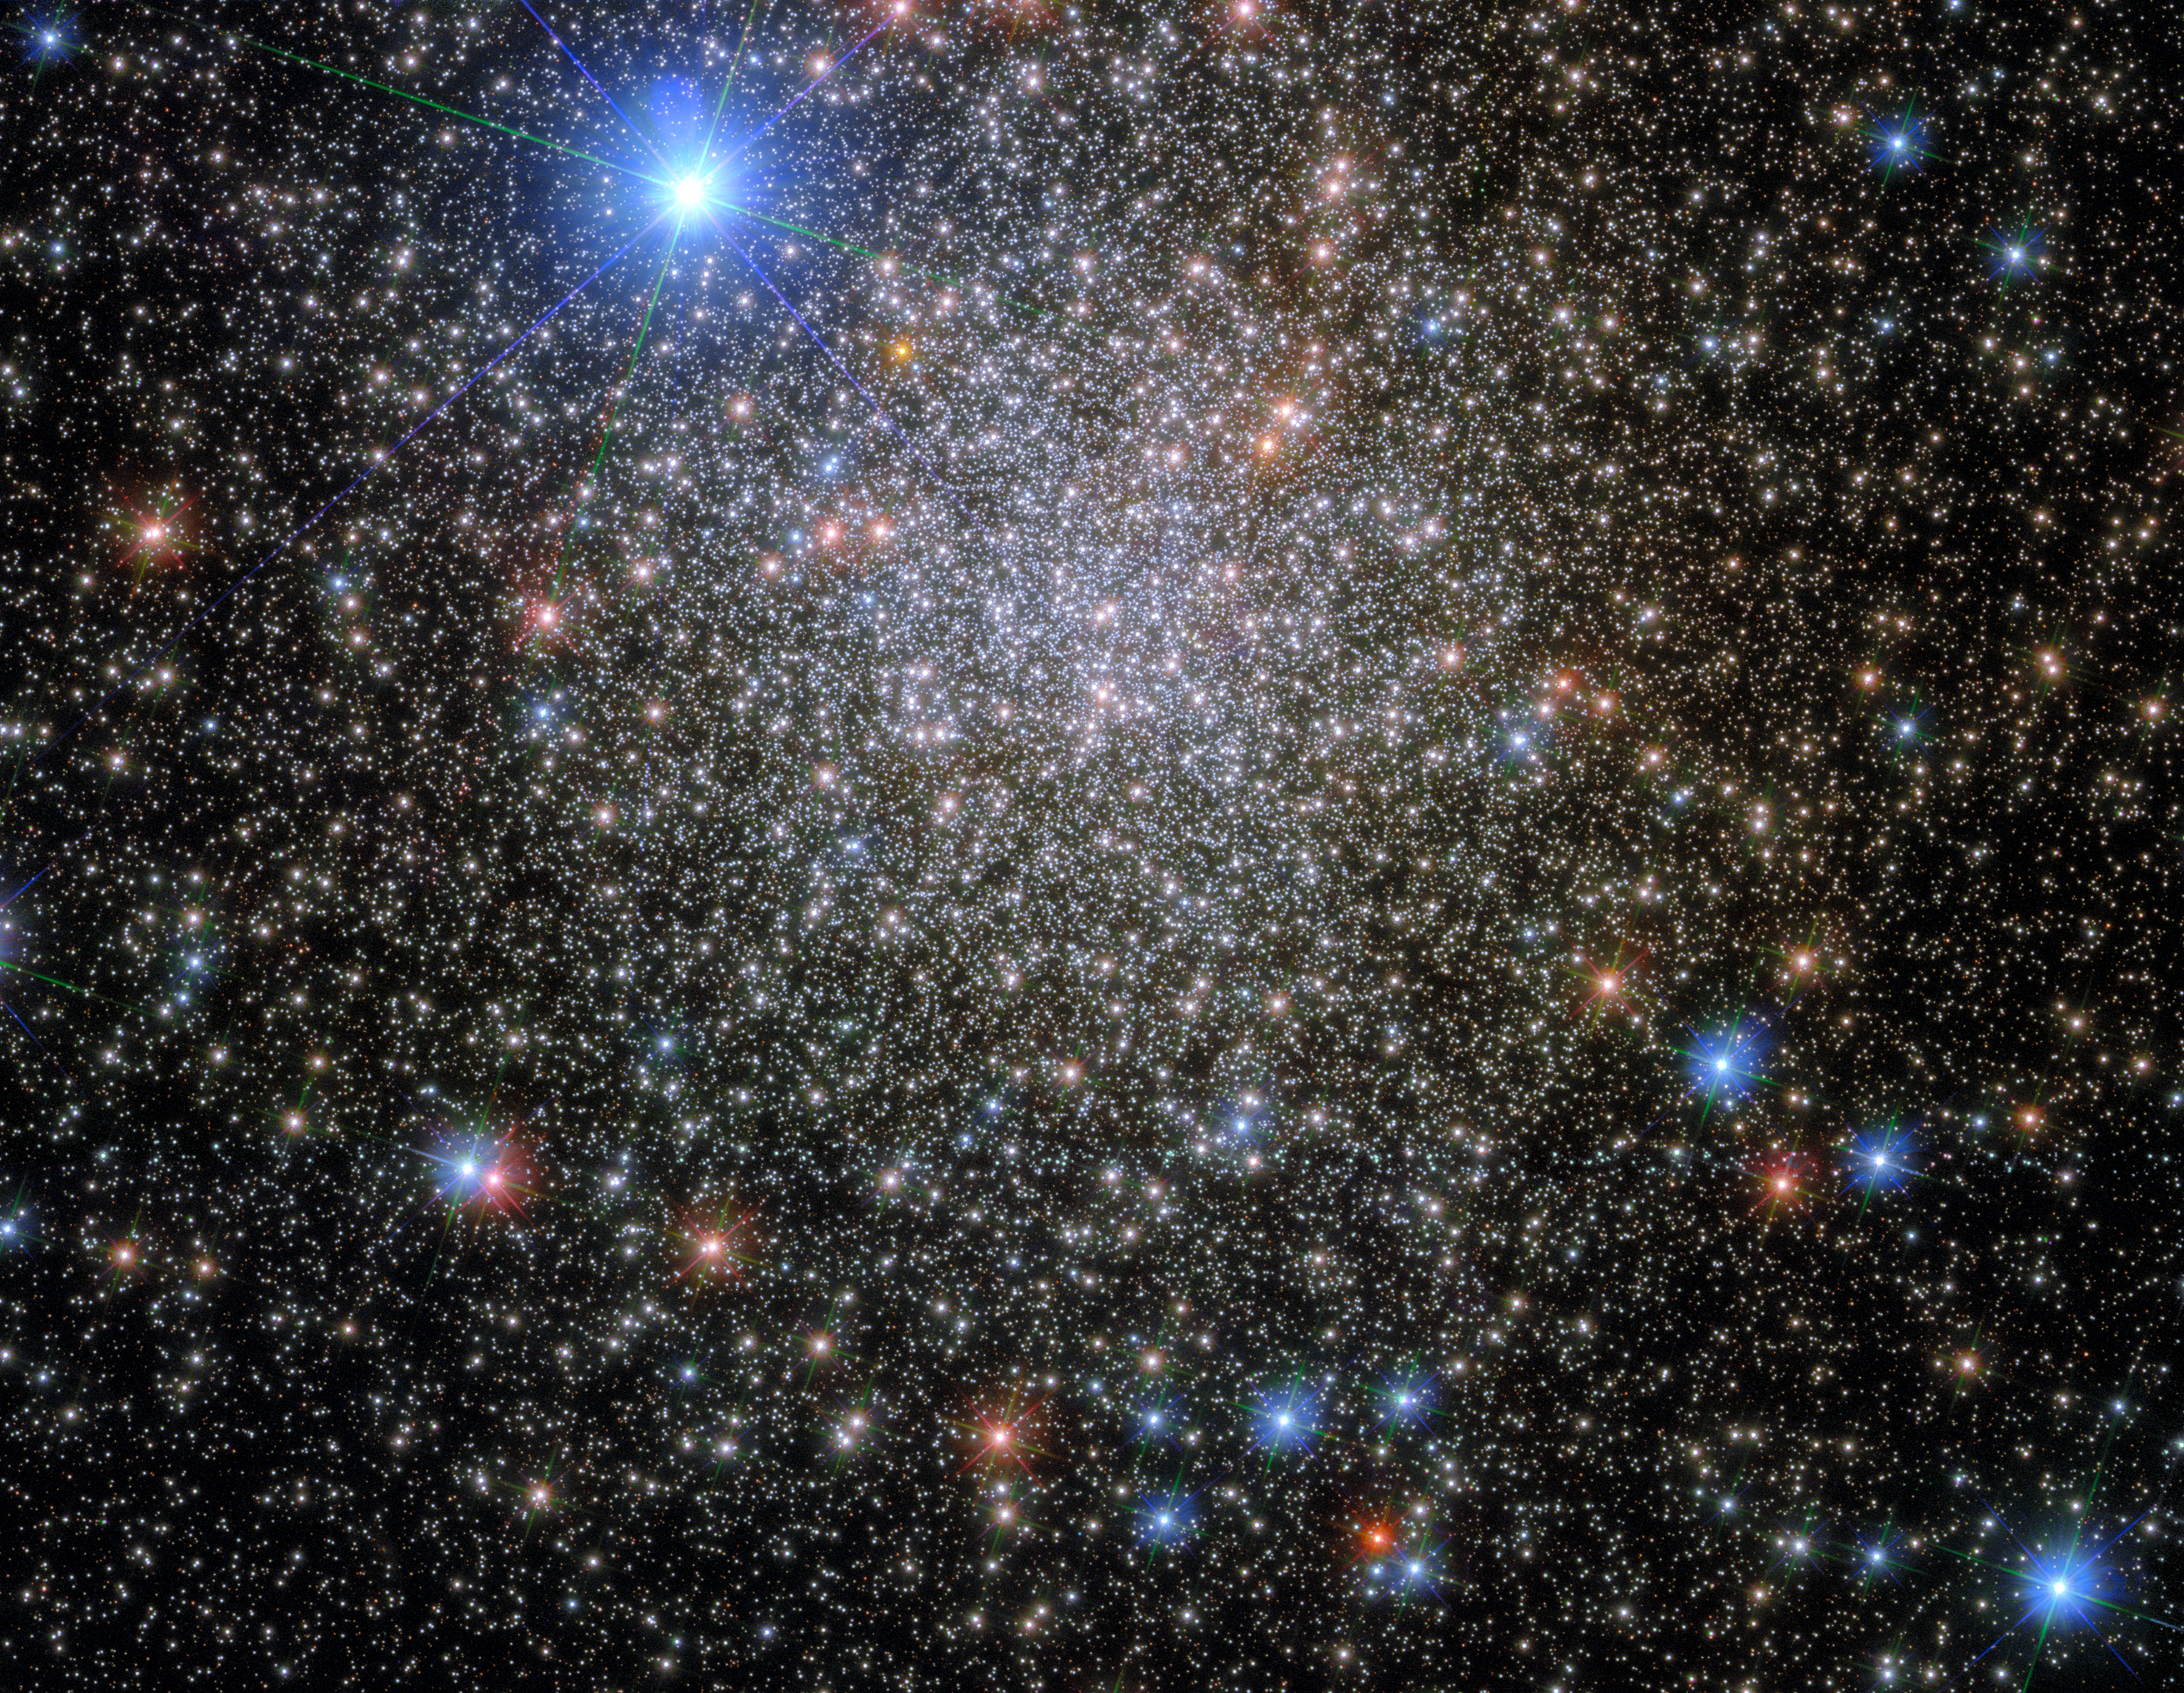

Rediscovered, Renamed, Reclassified

This image shows the globular cluster NGC 6380, which lies around 35 000 light-years from Earth, in the constellation Scorpio (The Scorpion). The very bright star at the top of the image is HD 159073, which is only around 4000 light-years from Earth, making it a much nearer neighbour to Earth than NGC 6380. This image was taken with Hubble’s Wide Field Camera 3 (WFC3), which, as its name suggests, has a wide field of view, meaning that it can image relatively large areas of the sky in enormous detail.

NGC 6380 is not a particularly exciting name, but it indicates that this cluster is catalogued in the New General Catalogue (NGC), which was originally compiled in 1888. This cluster has, however, been known by many other names. It was originally discovered by James Dunlop in 1826, and he rather immodestly named it Dun 538. Eight years later, in 1834, it was independently rediscovered by John Herschel and he (similarly immodestly) went on to name it H 3688. The cluster was re-rediscovered in 1959 in Paris by Pişmiş, who catalogued it as Tonantzintla 1 — and who, to continue the pattern, also referred to it as Pişmiş 25. In addition to its colourful history of rediscovery, up until the 1950s NGC 6380 was thought to be an open cluster. It was A. D. Thackeray who realised that it was in fact a globular cluster. Nowadays, this cluster is reliably recognised in widely available catalogues as a globular cluster, and referred to simply as NGC 6380.

Credit: ESA/Hubble & NASA, E. Noyola